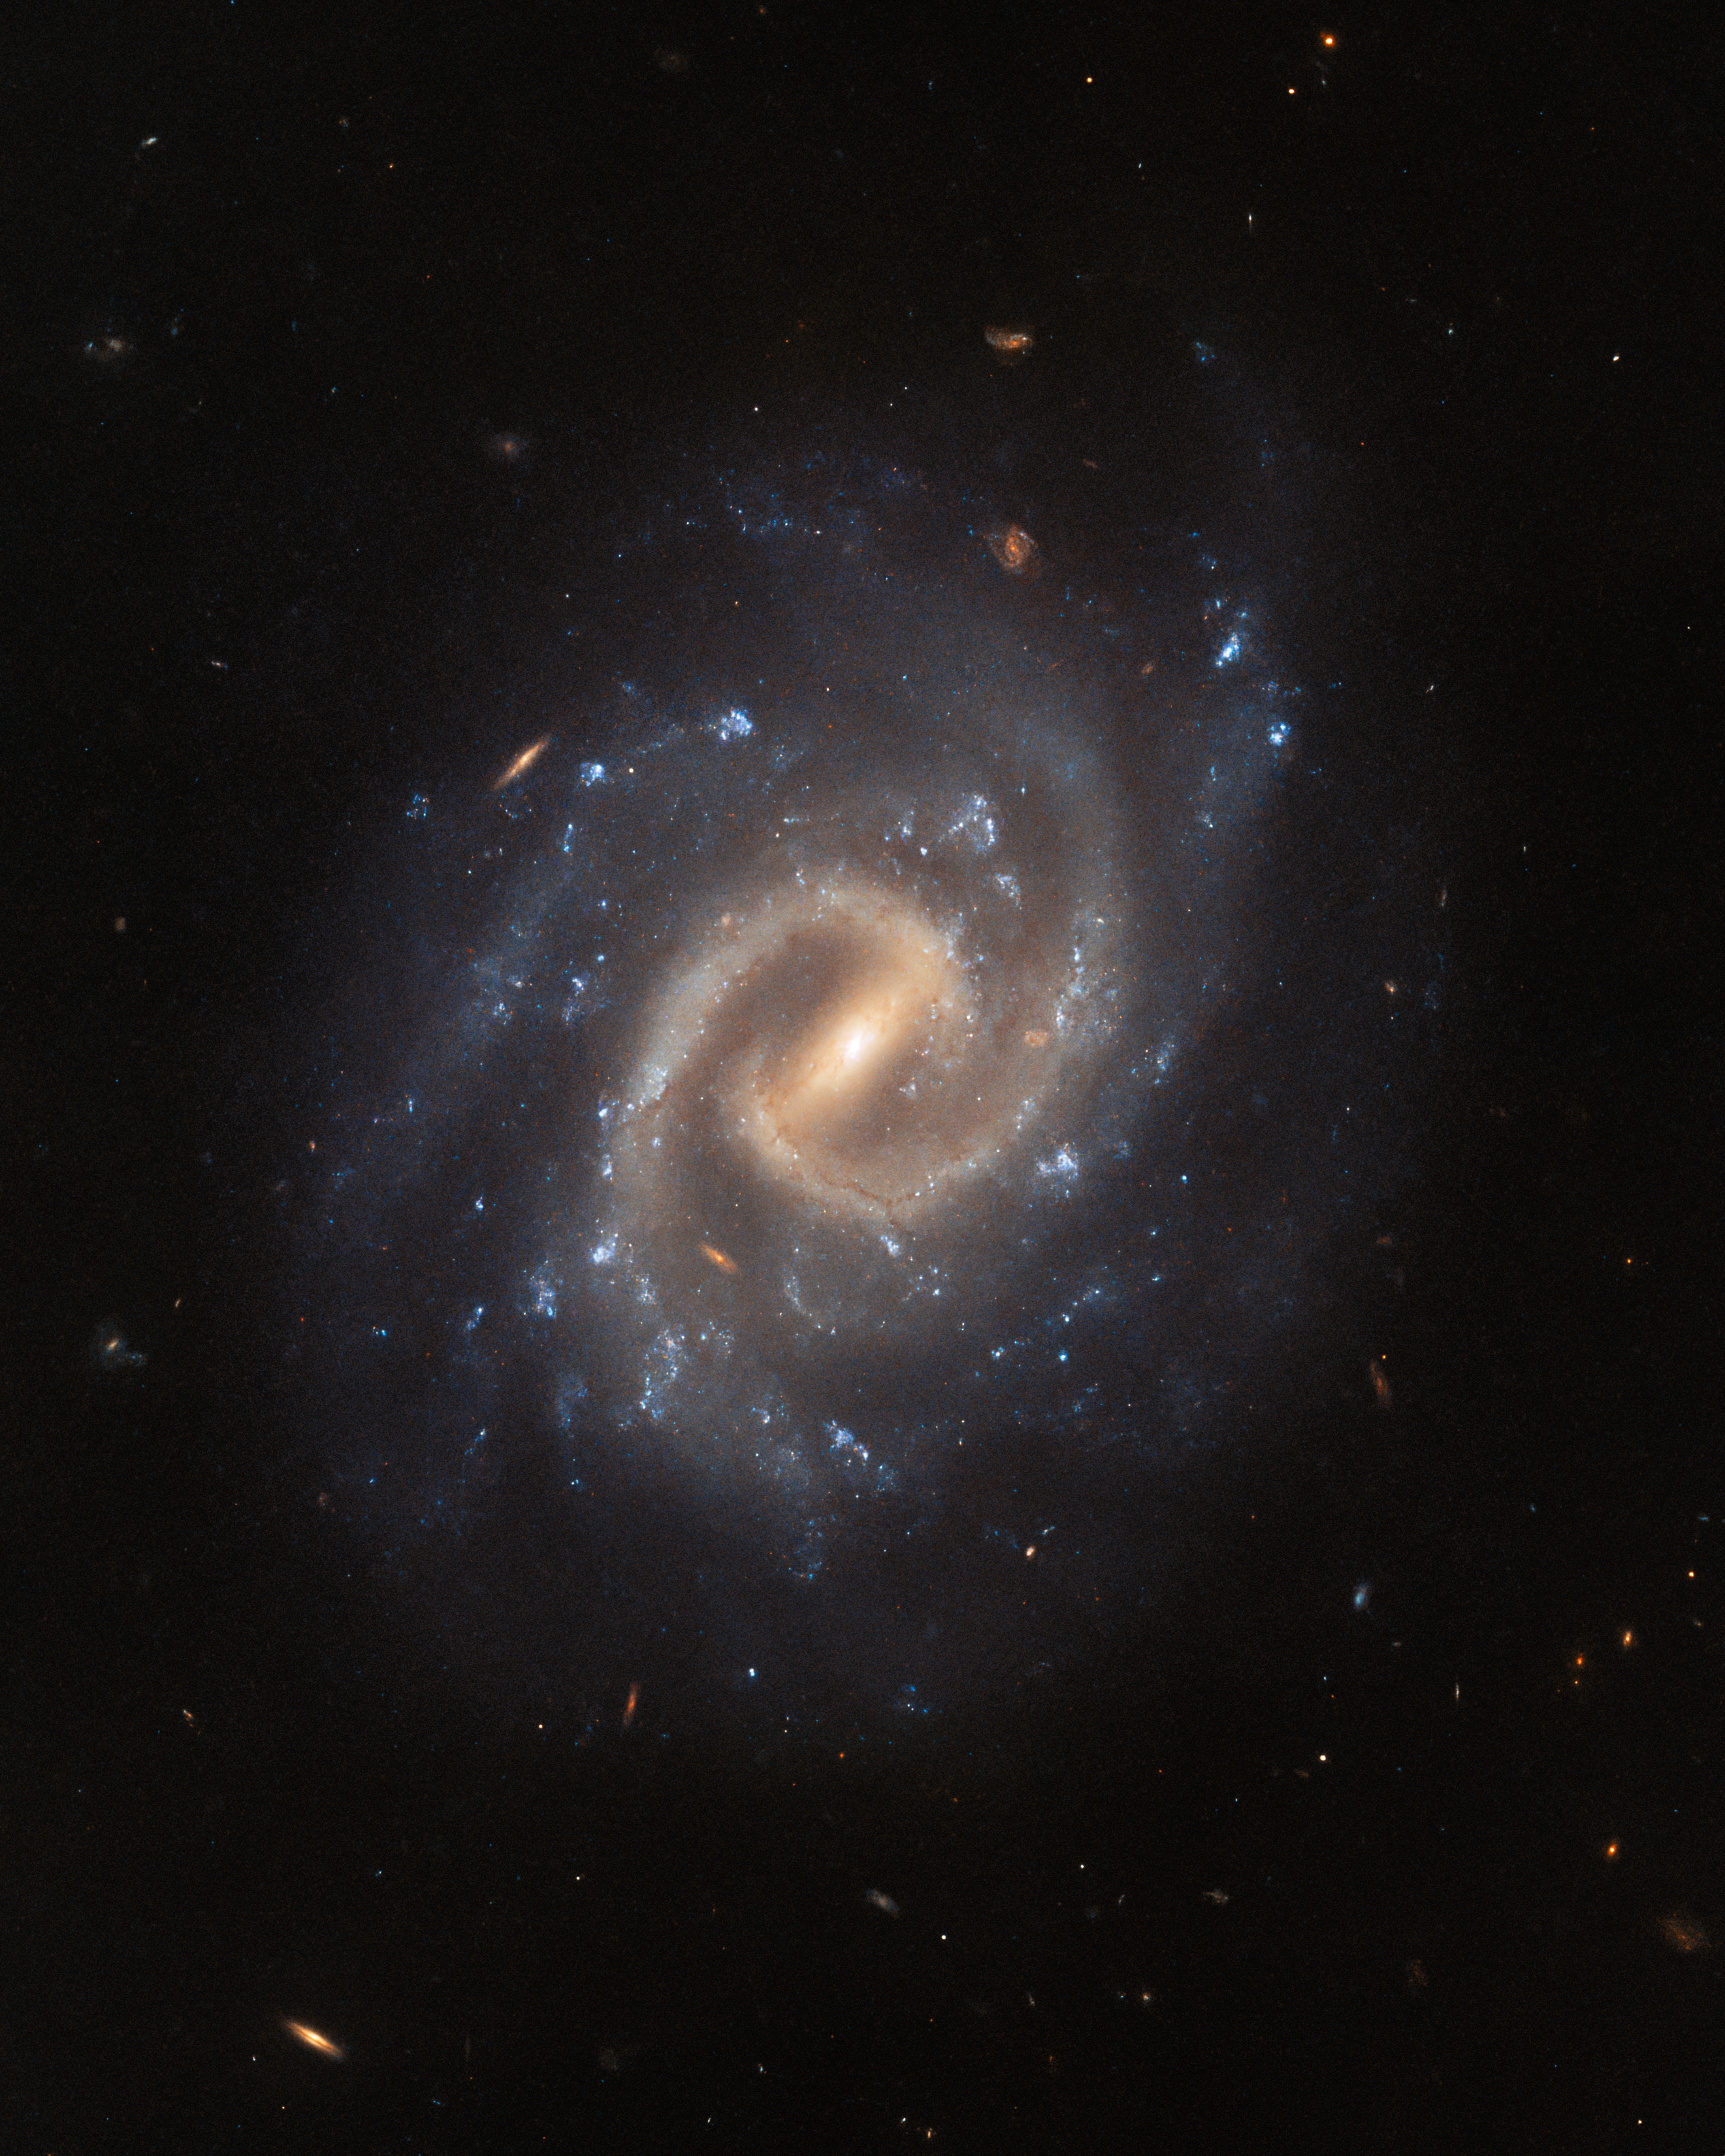

Galactic island of tranquillity

The tranquil spiral galaxy UGC 12295 basks leisurely in this image from the NASA/ESA Hubble Space Telescope. This galaxy lies around 192 million light-years away in the constellation Pisces, and is almost face-on when viewed from Earth, displaying a bright central bar and tightly wound spiral arms.

Despite appearing as an island of tranquillity in this image, UGC 12295 played host to a catastrophically violent explosion — a supernova — that was first detected in 2015. This supernova prompted two different teams of astronomers to propose Hubble observations of UGC 12295 that would sift through the wreckage of this vast stellar explosion.

Supernovae are the explosive deaths of massive stars, and are responsible for forging many of the elements found here on Earth. The first team of astronomers used Hubble’s Wide Field Camera 3 (WFC3) to examine the detritus left behind by the supernova in order to better understand the evolution of matter in our Universe.

The second team of astronomers also used WFC3 to explore the aftermath of UGC 12295’s supernova, but their investigation focused on returning to the sites of some of the best-studied nearby supernovae. Hubble’s keen vision can reveal lingering traces of these energetic events, shedding light on the nature of the systems that host supernovae.

Credit: ESA/Hubble & NASA, A. Filippenko, J. Lyman